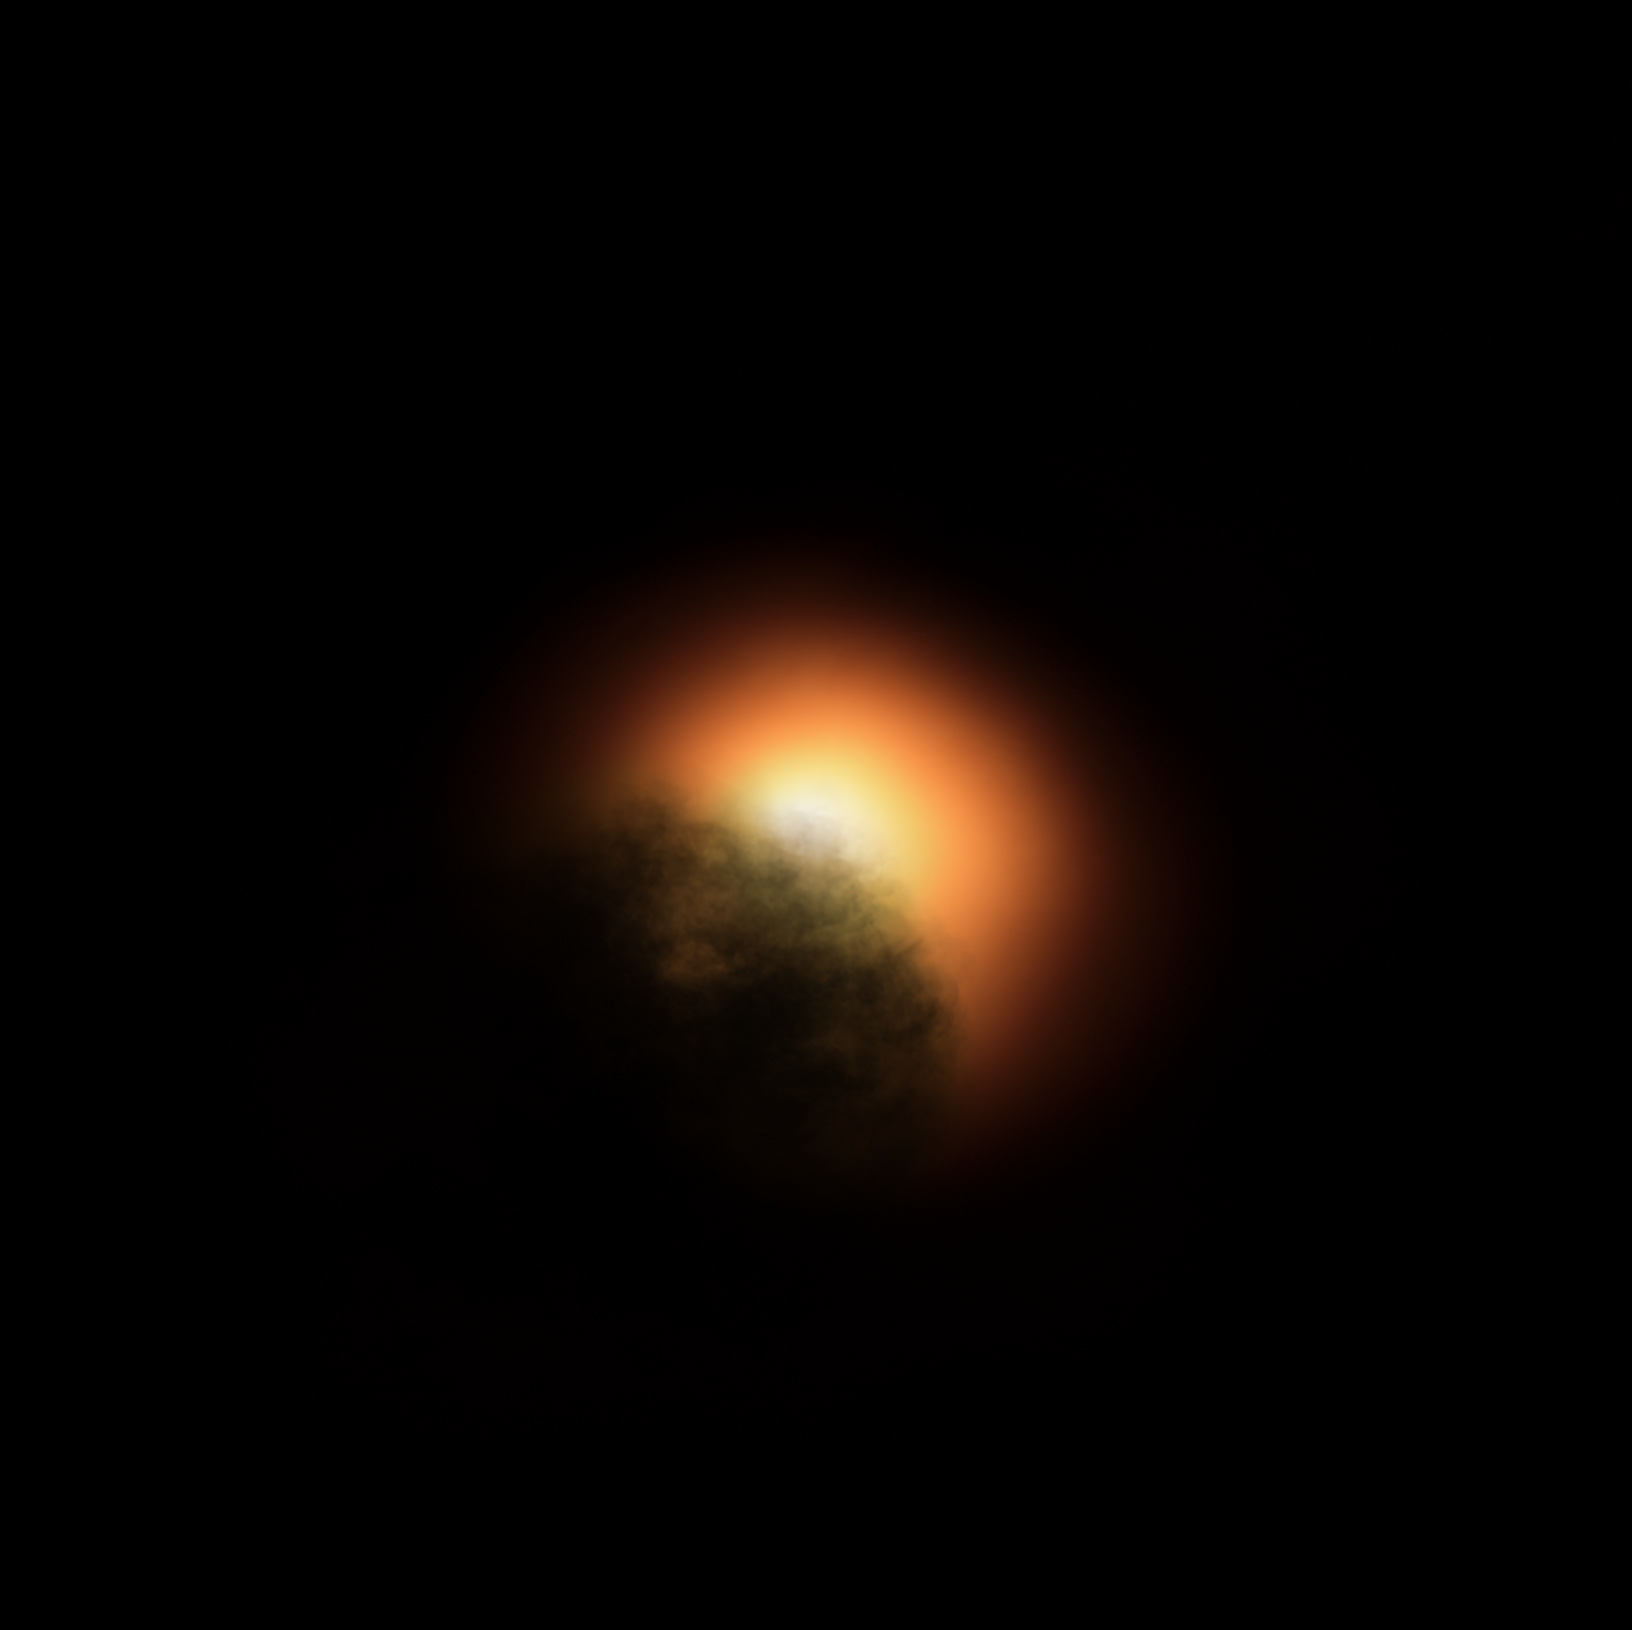

Betelgeuse’s Dust Cloud (Artist’s Impression)

New observations by the NASA/ESA Hubble Space Telescope suggest that the unexpected dimming of the supergiant star Betelgeuse was most likely caused by an immense amount of hot material that was ejected into space, forming a dust cloud that blocked starlight coming from the star’s surface.

This artist's impression was generated using an image of Betelgeuse from late 2019 taken with the SPHERE instrument on the European Southern Observatory's Very Large Telescope.

Credit: ESO, ESA/Hubble, M. Kornmesser